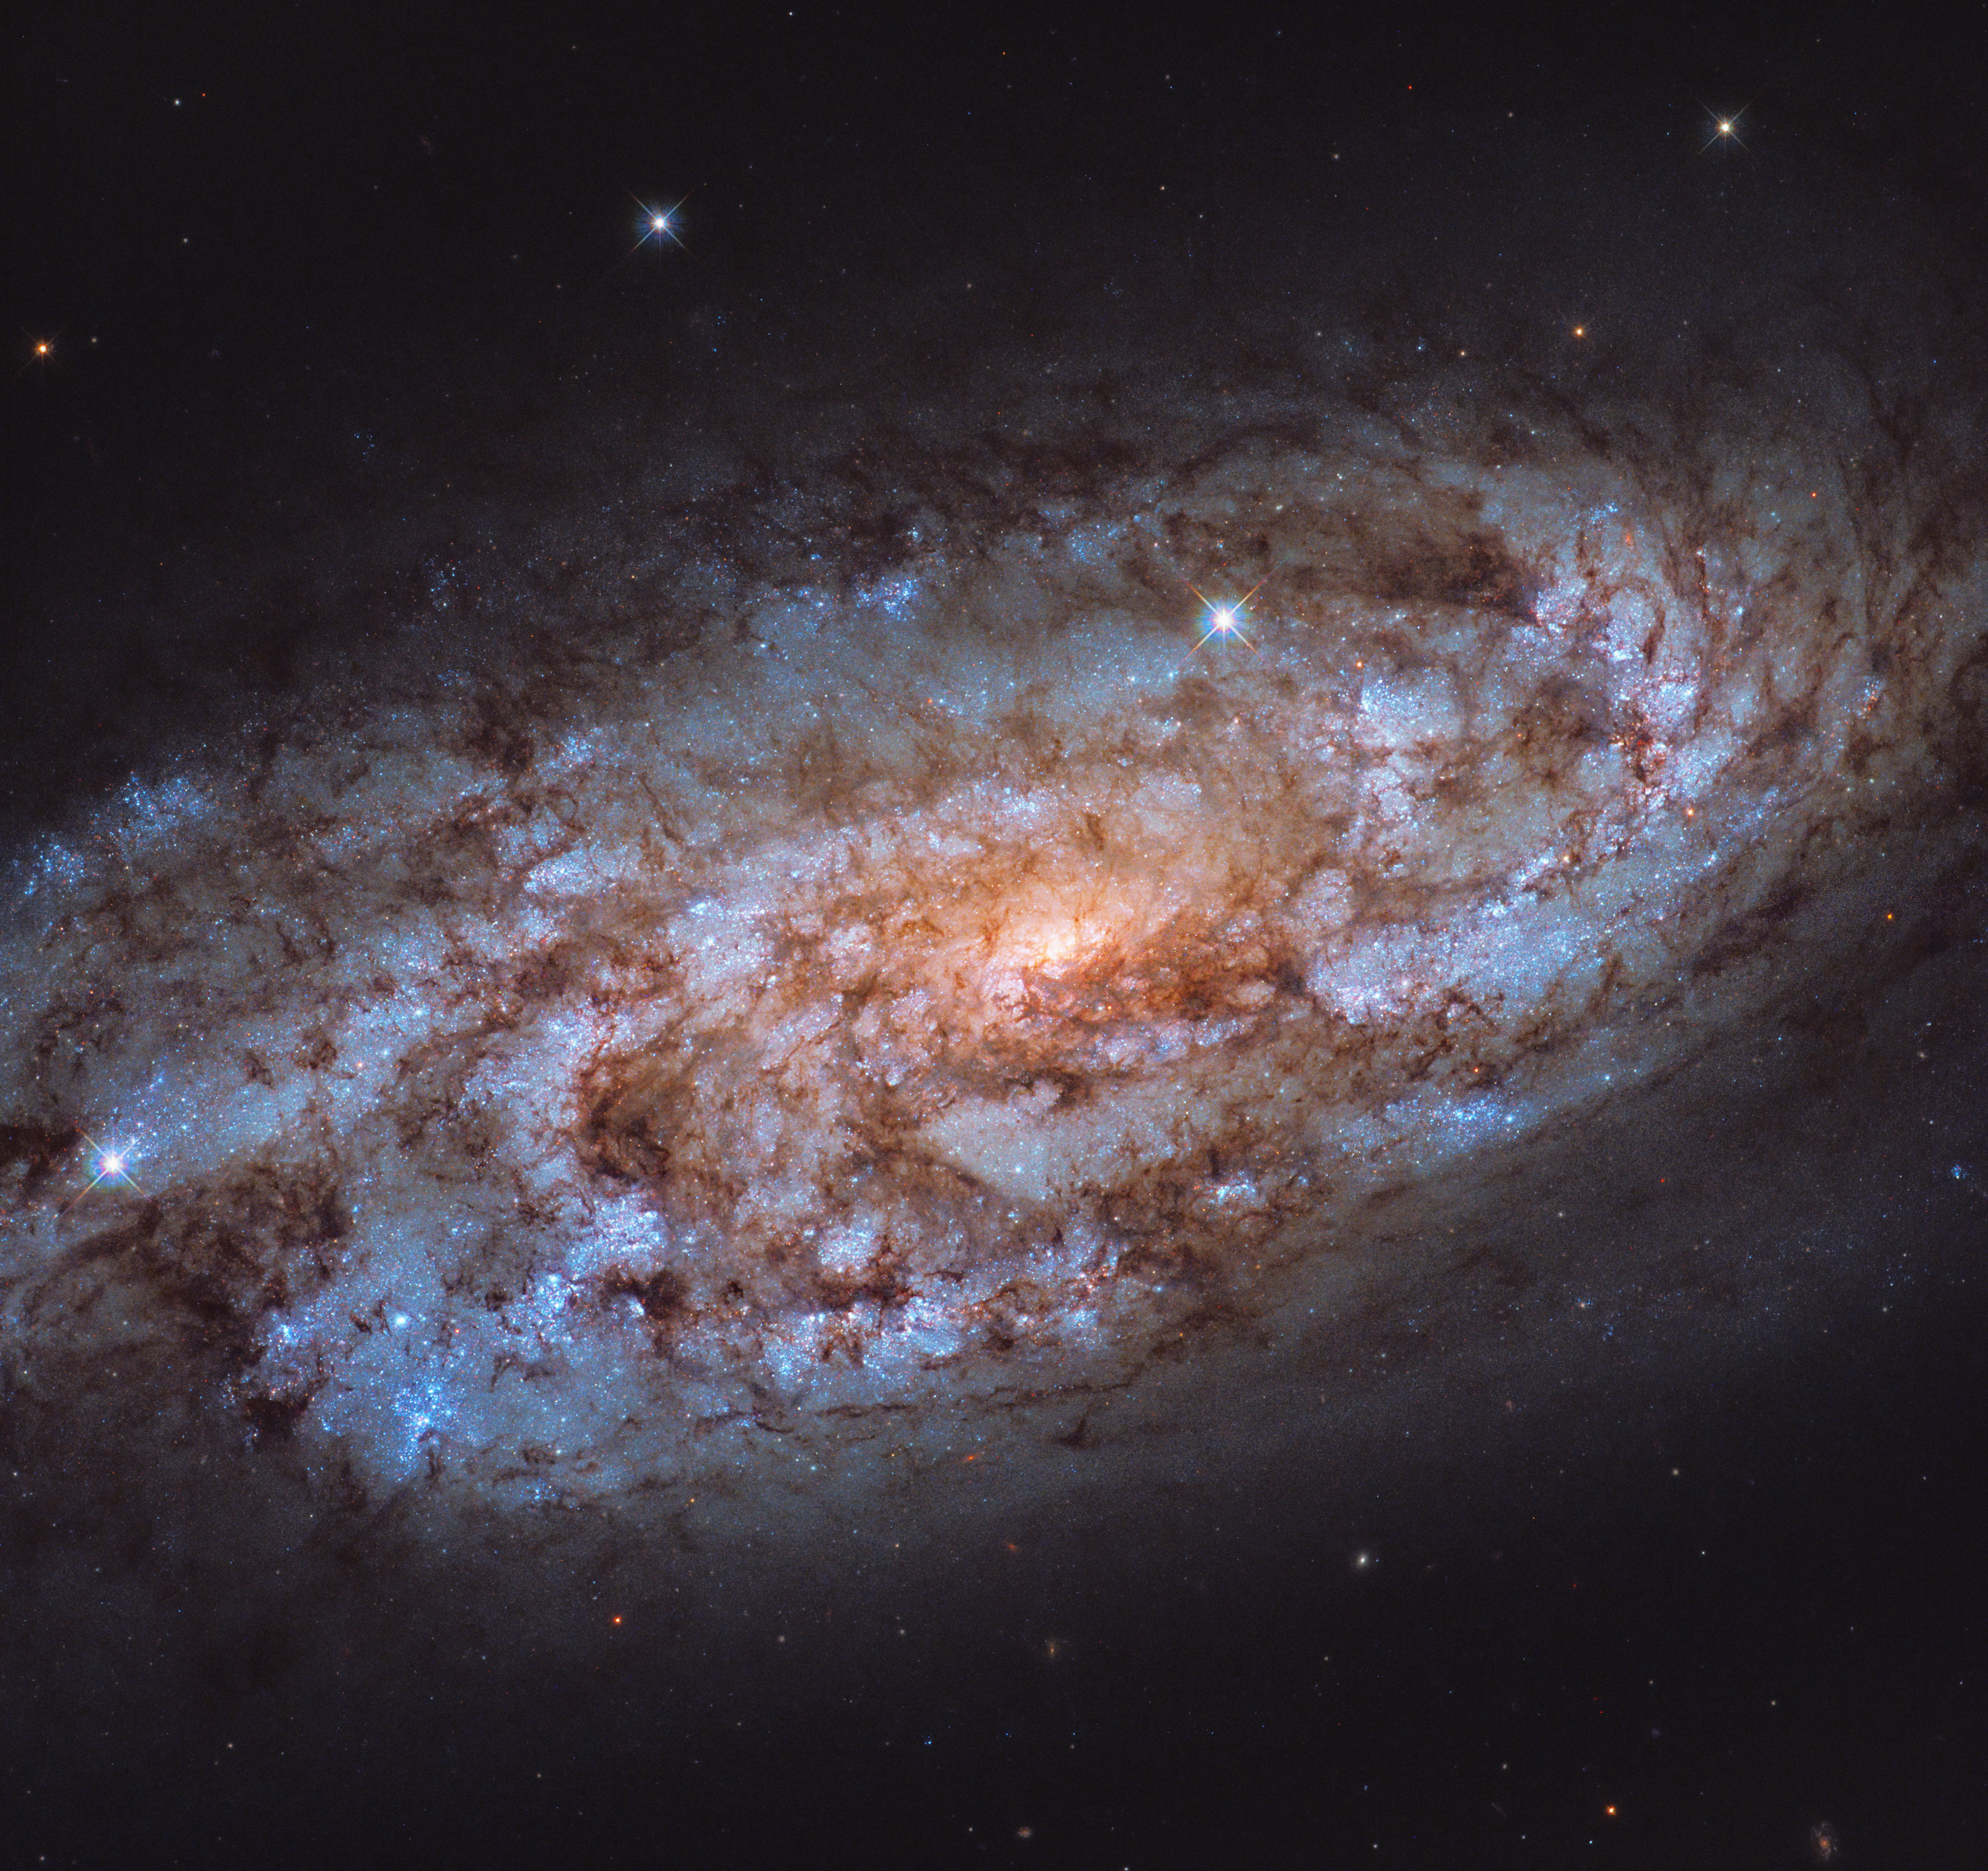

The Stellar Forge

An orange glow radiates from the centre of NGC 1792, the heart of this stellar forge. Captured by the NASA/ESA Hubble Space Telescope, this intimate view of NGC 1792 gives us some insight into this galactic powerhouse. The vast swathes of tell-tale blue seen throughout the galaxy indicate areas that are full of young, hot stars, and it is in the shades of orange, seen nearer the centre, that the older, cooler stars reside.

Nestled in the constellation of Columba (The Dove), NGC 1792 is both a spiral galaxy, and a starburst galaxy. Within starburst galaxies, stars are forming at comparatively exorbitant rates. The rate of star formation can be more than 10 times faster in a starburst galaxy than in the Milky Way. When galaxies have a large resevoir of gas, like NGC 1792, these short lived starburst phases can be sparked by galactic events such as mergers and tidal interactions. One might think that these starburst galaxies would easily consume all of their gas in a large forming event. However, supernova explosions and intense stellar winds produced in these powerful starbursts can inject energy into the gas and disperse it. This halts the star formation before it can completely deplete the galaxy of all its fuel. Scientists are actively working to understand this complex interplay between the dynamics that drive and quench these fierce bursts of star formation.

Credit: ESA/Hubble & NASA, J. Lee Acknowledgement: Leo Shatz